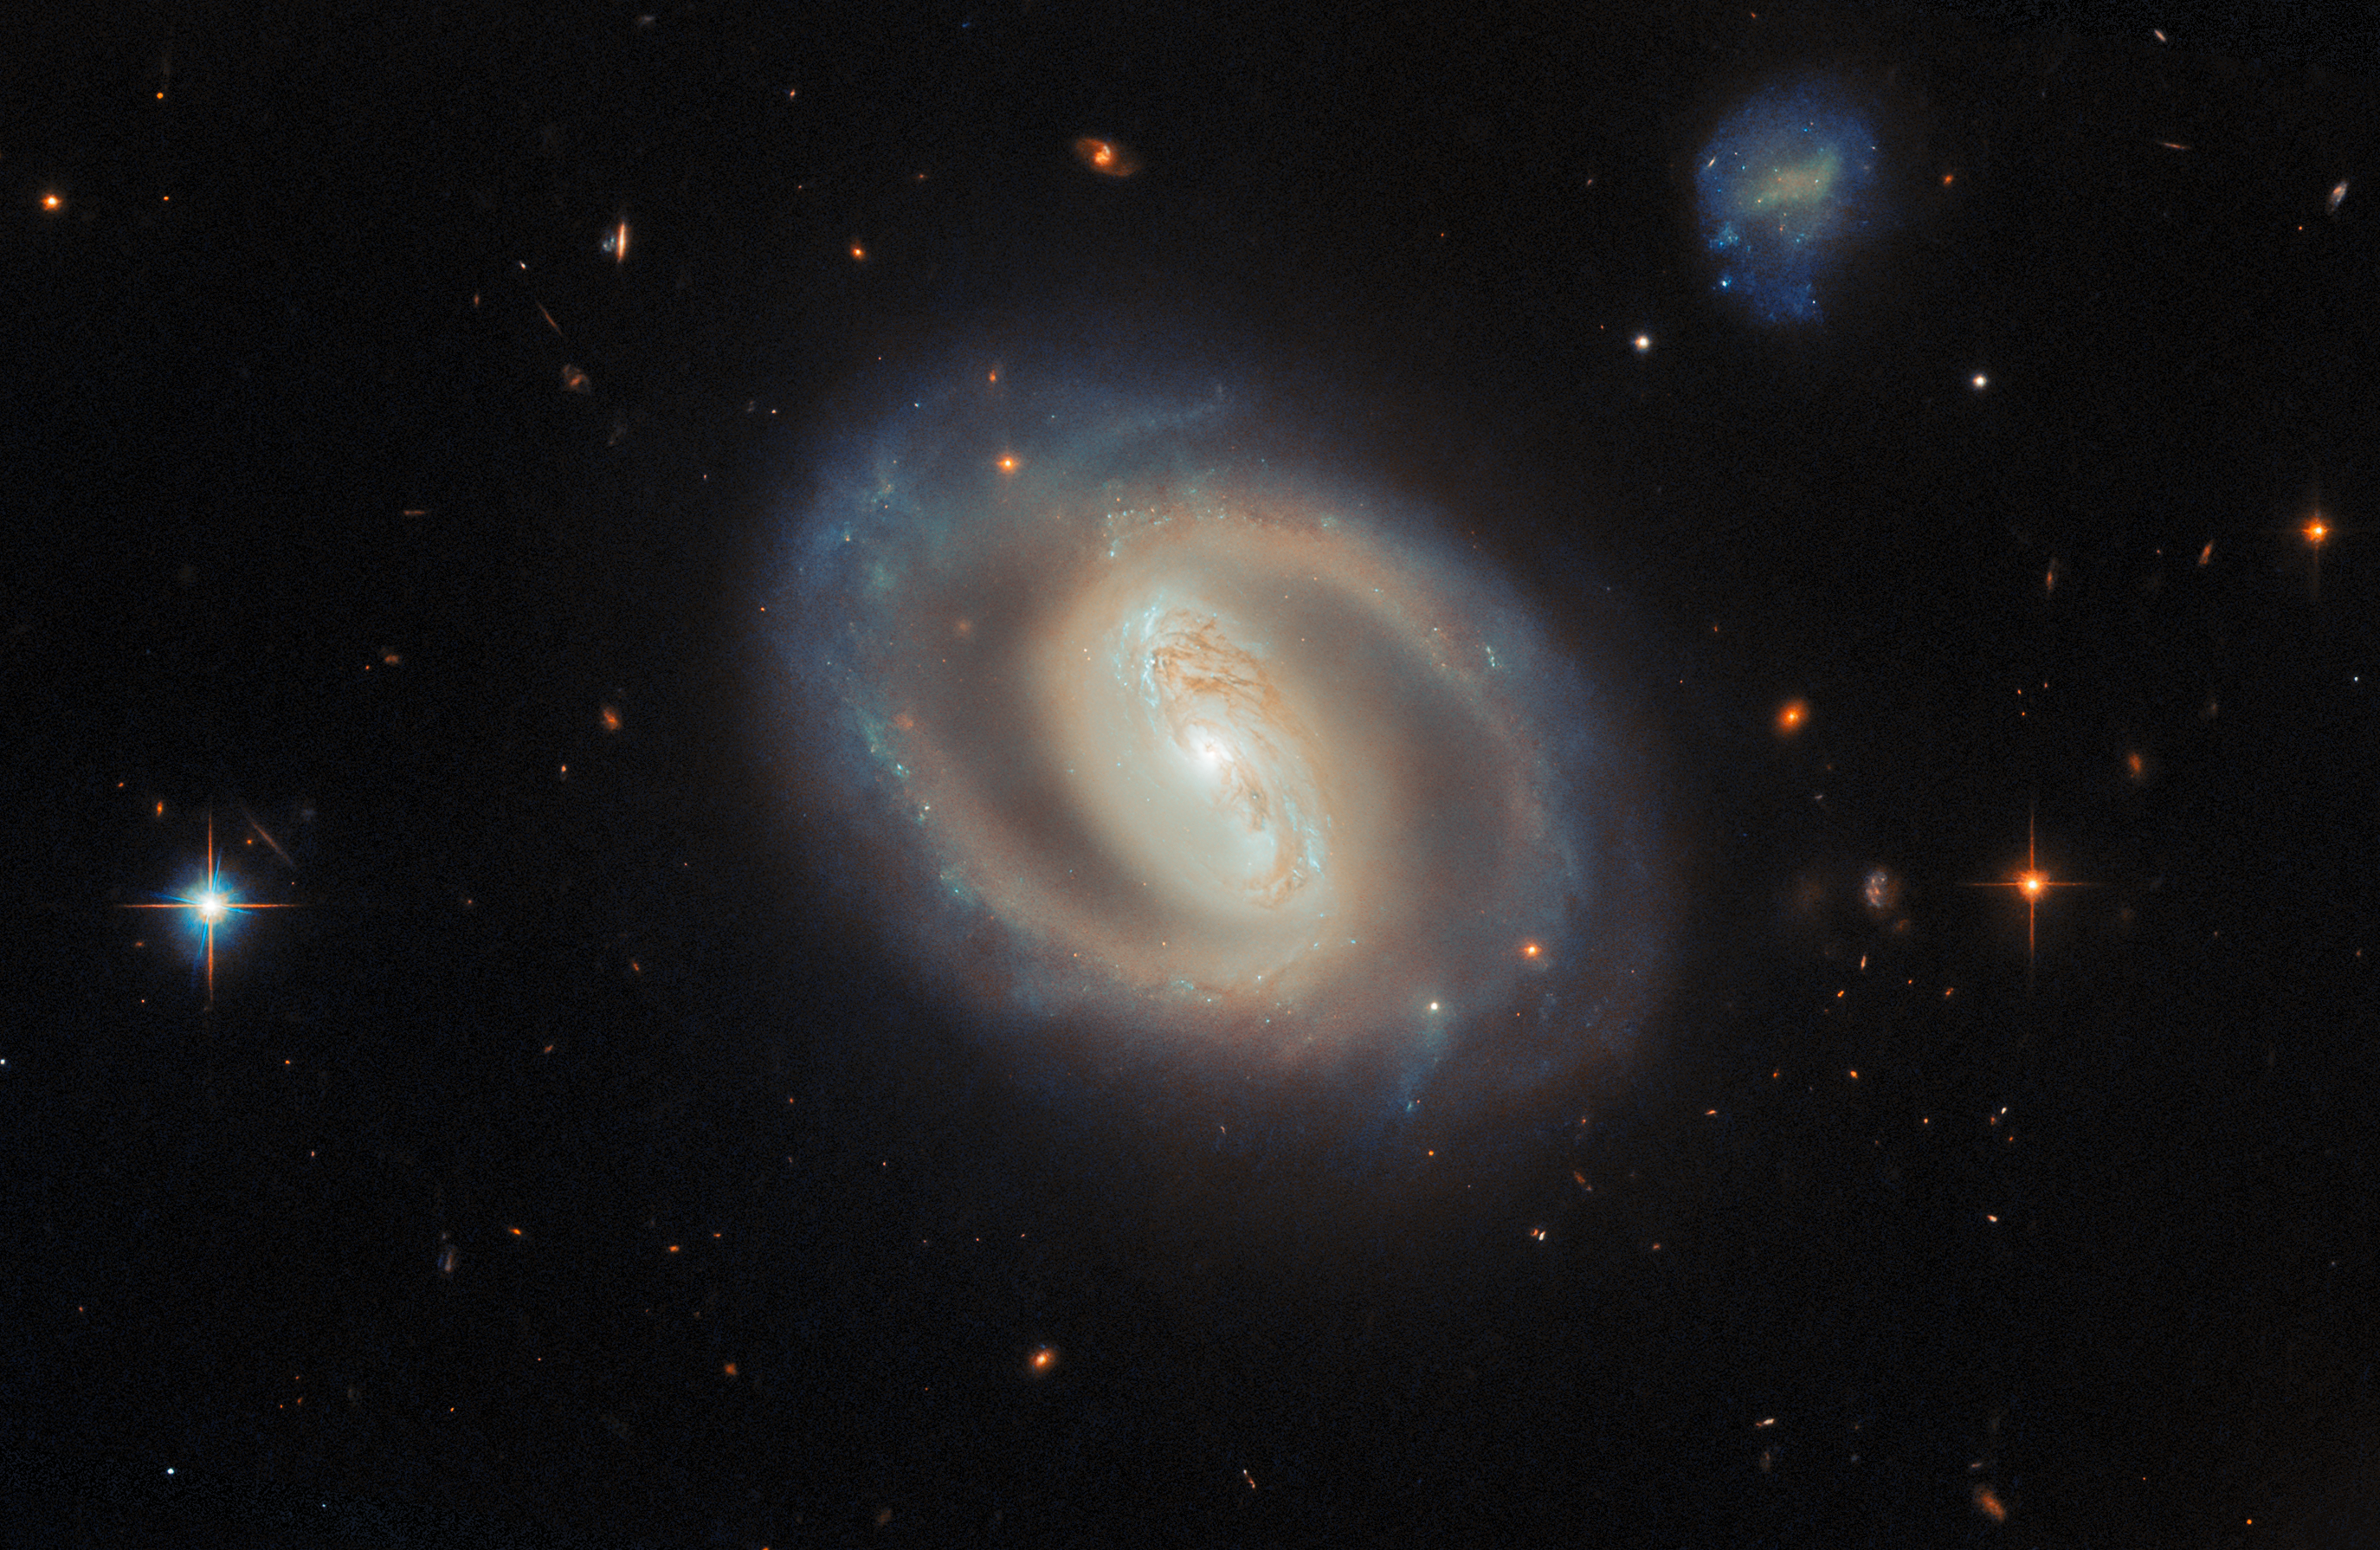

Where spiral arms and star formation meet

A luminous swirl set against the deep black of space, the barred spiral galaxy IC 486 glows with a soft, ethereal light in this new ESA/Hubble Picture of the Month image.

IC 486 lies right on the edge of the constellation Gemini (the Twins), around 380 million light-years from Earth. Classified as a barred spiral galaxy, it features a bright central bar-shaped structure from which its spiral arms unfurl, wrapping around the core in a smooth, almost ring-like pattern.

Hubble’s keen eye reveals subtle variations in colour across the galaxy. The pale, luminous centre is dominated by older stars, while faint bluish regions in the surrounding disc trace pockets of more recent star formation. Wisps of dust thread through the galaxy’s structure, gently obscuring light and tracing regions of increased molecular gas where new stars are likely to form.

At the galaxy’s centre a noticeable white glow outshines the starlight around it. This is light given off by IC 486’s active galactic nucleus (AGN), powered by a supermassive black hole more than 100 million times the mass of the Sun. Every sufficiently large galaxy hosts a supermassive black hole at its centre, but some of these black holes are particularly ravenous, marshalling vast amounts of gas and dust into swirling accretion discs from which they feed. The intense heat generated by the orbiting disc of material generates intense radiation up to and including X-rays, which can outshine the entire rest of the galaxy. In these cases, the galaxy is known as an active galaxy, with an AGN at its centre.

The data used to make this image comes from two separate observing programmes — #17310 (PI: M. J. Koss) and #15444 (PI: A. J. Barth) — with similar aims: to survey nearby active galaxies like IC 486 and record detailed, high-quality images of their central black holes and the stars near the core of the galaxy. By combining Hubble’s sharp imaging with large comprehensive samples, these programmes are enabling detailed comparisons of how stars, gas, dust, and black holes interact in galaxy centres.

A key goal of this work is to understand how galaxies grow by linking their large-scale structures, such as bars and spiral arms, to activity in their nuclei. To achieve this, the research teams are leveraging both expert classifications and citizen science through Galaxy Zoo, with datasets that will ultimately be released to the public. In parallel, the same images are being used to test how well large language models and other machine learning techniques can reproduce or extend human classifications, offering a new way to scale galaxy morphology studies to the largest surveys that are currently being performed with the Euclid telescope.

Beyond IC 486 itself, the image is peppered with distant background galaxies and foreground stars. Some stars appear with characteristic diffraction spikes, while the more diffuse, reddish smudges are far more distant galaxies scattered across the cosmos.

Though it may appear calm and orderly, IC 486 is a dynamic system shaped by gravity and stellar evolution. Over millions of years, its structure will continue to evolve as stars are born, age, and fade, contributing to the ongoing story of galactic life in the Universe.

Credit: ESA/Hubble & NASA, M. J. Koss, A. J. Barth